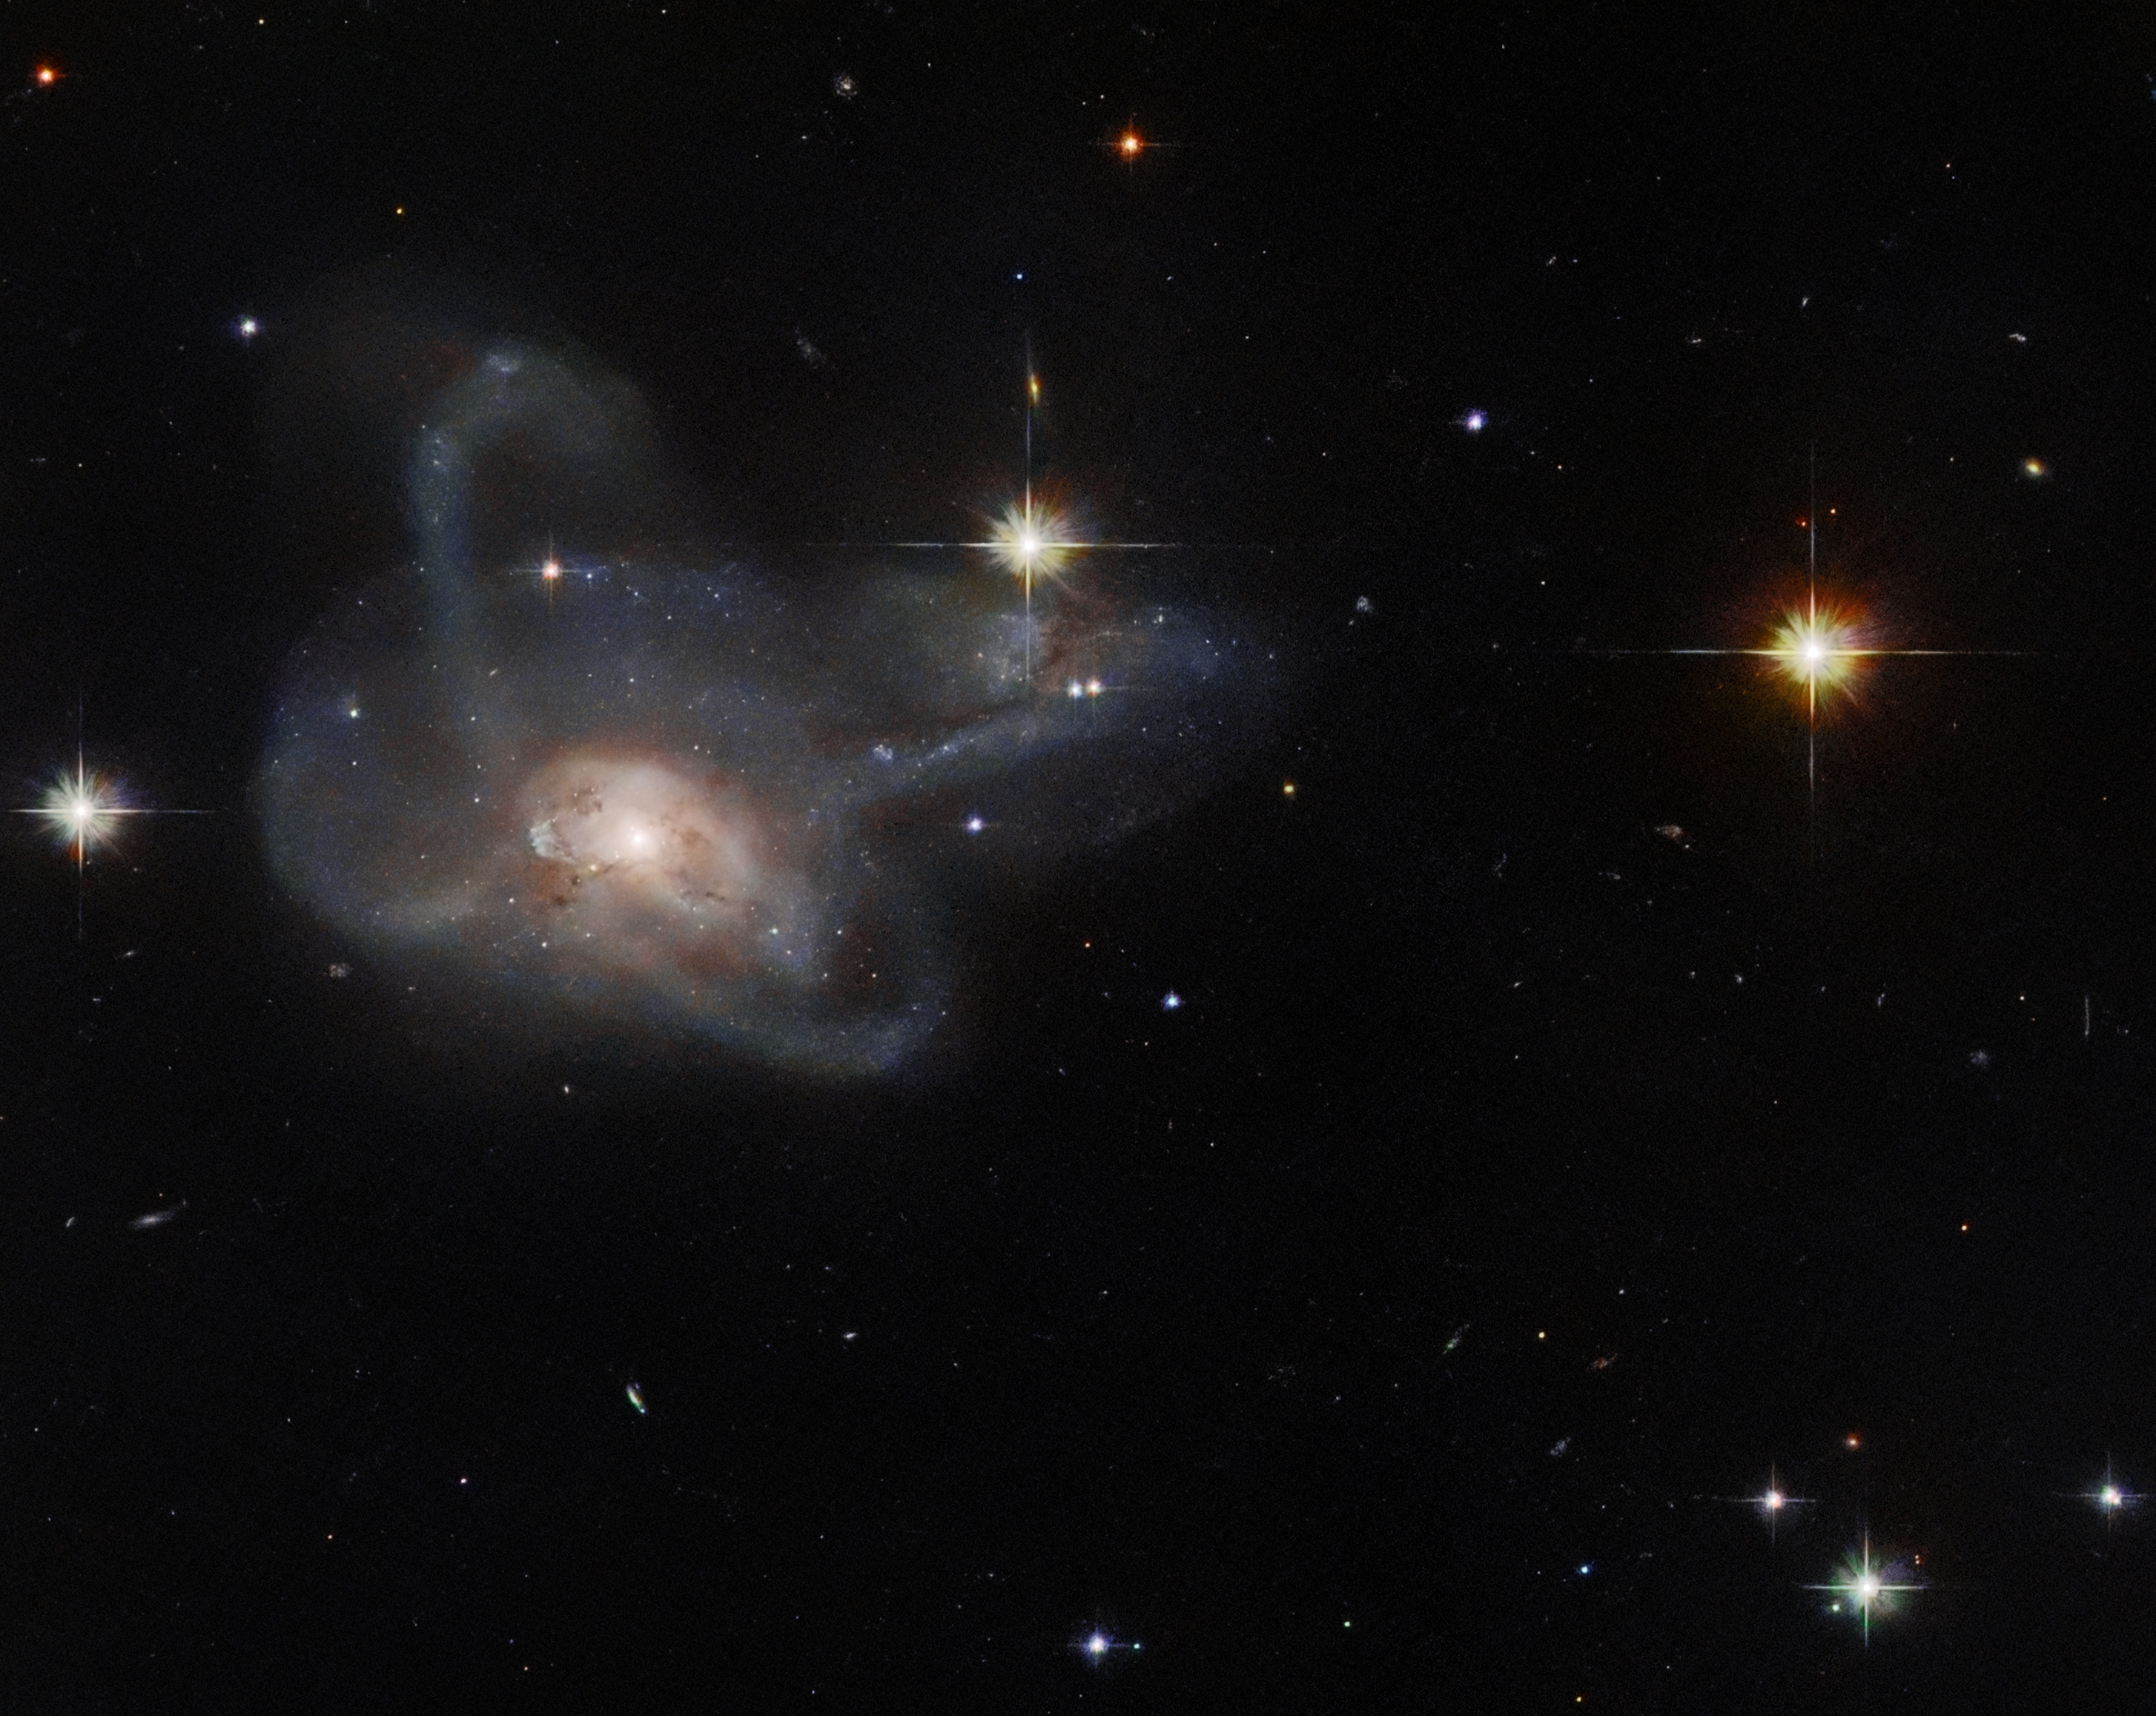

Hubble Spies a Galactic Gem

This NASA/ESA Hubble Space Telescope observation has captured the galaxy CGCG 396-2, an unusual multi-armed galaxy merger which lies around 520 million light-years from Earth in the constellation Orion.

This observation is a gem from the Galaxy Zoo project, a citizen science project in which hundreds of thousands of volunteers classified galaxies to help scientists solve a problem of astronomical proportions — how to sort through the vast amounts of data generated by robotic telescopes. Following a public vote, a selection of the most astronomically intriguing objects from the Galaxy Zoo were selected for follow-up observations with Hubble. CGCG 396-2 is one such object, and was captured in this image by Hubble’s Advanced Camera for Surveys.

The Galaxy Zoo project originated when an astronomer was set an impossibly mind-numbing task; classifying more than 900 000 galaxies by eye. By making a web interface and inviting citizen scientists to contribute to the challenge, the Galaxy Zoo team was able to crowdsource the analysis, and within six months a legion of 100 000 volunteer citizen astronomers had contributed more than 40 million galaxy classifications.
Since its initial success, the Galaxy Zoo project and its successor projects have contributed to more than 100 peer-reviewed scientific articles and led to a rich variety of intriguing astronomical discoveries above and beyond their initial goals. The success of the project also inspired more than 100 citizen science projects on the Zooniverse portal, ranging from analysing data from the ESA Rosetta spacecraft's visit to Comet 67P/Churyumov–Gerasimenko to counting killer whales around remote Alaskan islands!

Credit: ESA/Hubble & NASA, W. Keel, SDSS